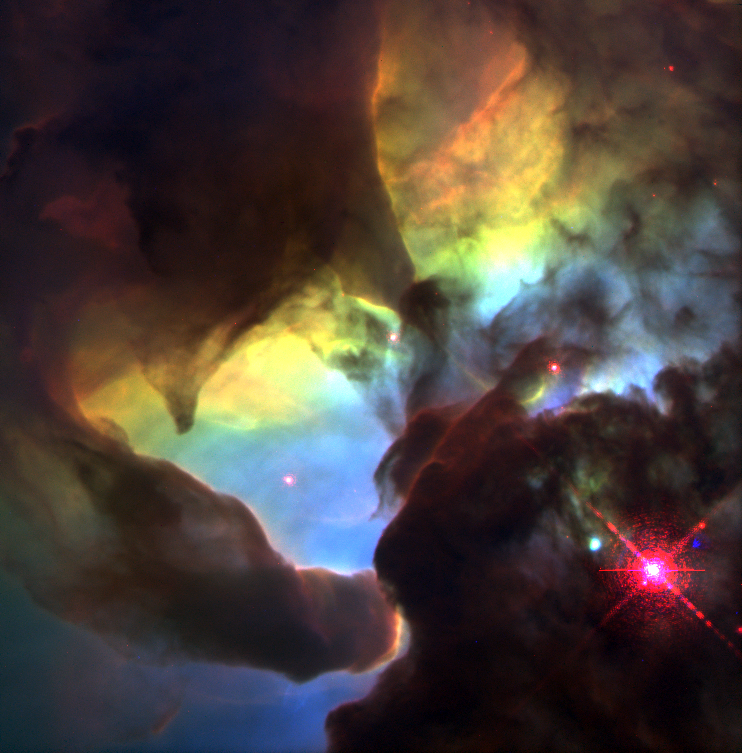

Giant 'twisters' in the Lagoon Nebula

This Hubble Space Telescope (HST) image reveals a pair of one-half light-year long interstellar 'twisters' - eerie funnels and twisted-rope structures - in the heart of the Lagoon Nebula (Messier 8) which lies 5,000 light-years away in the direction of the constellation Sagittarius.

Credit: A. Caulet (ST-ECF, ESA) and NASA